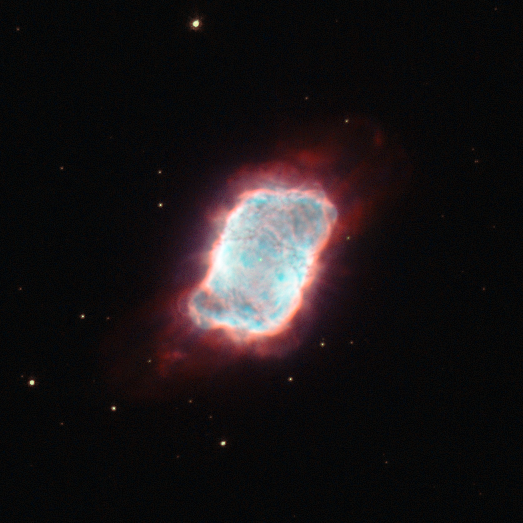

A star Makes a billowy exit

The NASA/ESA Hubble Space Telescope snapped this striking image of an aging star whose outer layers of gas have blown off into space. These gases glow in the fierce ultraviolet glare from the hot, small remnant of the star at the cloud's centre.

This object, which is designated NGC 6741, also known as the Phantom Streak Nebula, is located about 7000 light-years away in the constellation of Aquila (the Eagle). NGC 6741 is classed as a planetary nebula, though no planets are responsible for this billowy cloud; the term came about in the 18th century because the round gas shells resembled the Solar System's outer giant planets in astronomers' telescopes. Although fairly bright, this object appears very small though a typical telescope and was missed by early surveyors of the skies and only spotted in 1882 by Edward Charles Pickering.

Stars with sizes that are somewhat smaller than our Sun to several times its mass often become planetary nebulae. This brief, late-in-life phase is entered after stars have ballooned into red giants. The still-energetic cores of these swollen stars cast off their own outer gaseous layers and the expanding bubble of material is set aglow by the central star's intense ultraviolet light. The newly formed planetary nebula then shines for perhaps 10 000 years before the material drifts away and leaves the progenitor star to very slowly cool and fade.

Planetary nebulae are short-lived and come in a wide assortment of shapes and sizes. Only about a fifth are spherical, and others can look like rings, discs, tubes or be entirely without symmetry, owing to distortions introduced by magnetic fields, binary central stars and as-yet unexplained phenomena. NGC 6741 does contain a second star and is thought to be well along in its period as a planetary nebula, and has assumed more of a rectangular shape, rather like a luminous pillow.

This picture was created from images taken with Hubble's Wide Field Planetary Camera 2. The red light was captured through a filter that isolated the red glow from hydrogen (F658N), light through a yellow filter was coloured green (F555W), and the blue was a combination of the green and the glow of oxygen (F555W and F502N). The exposure times were ten minutes (F658N), two minutes (F555W) and ten minutes (F502W). The field of view spans just 24 arcseconds.

Credit: ESA/Hubble and NASA